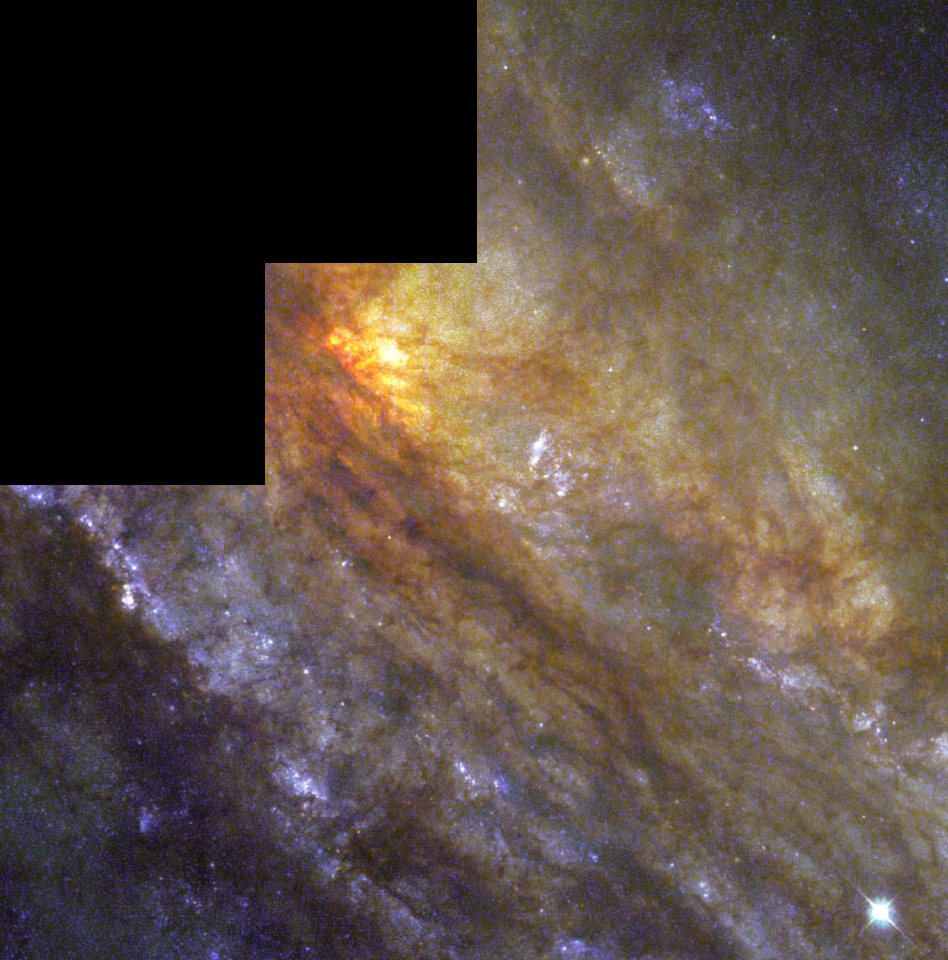

Behind a dusty veil lies a cradle of star birth

NGC 253 is a large, almost edge-on spiral galaxy, and is one of the nearest galaxies beyond our local neighborhood of galaxies. This dramatic galaxy shows complex structures such as clumpy gas clouds, darkened dust lanes, and young, luminous central star clusters. These elements are typical of spiral galaxies. Caroline Herschel discovered NGC 253 in 1783 while looking for comets. The galaxy's closeness to Earth makes it an ideal target for amateur astronomers who can see the southern sky and for astronomers interested in learning more about the makeup of these stunning cities of stars.

Credit: Hubble Heritage Team (AURA/STScI/NASA/ESA)